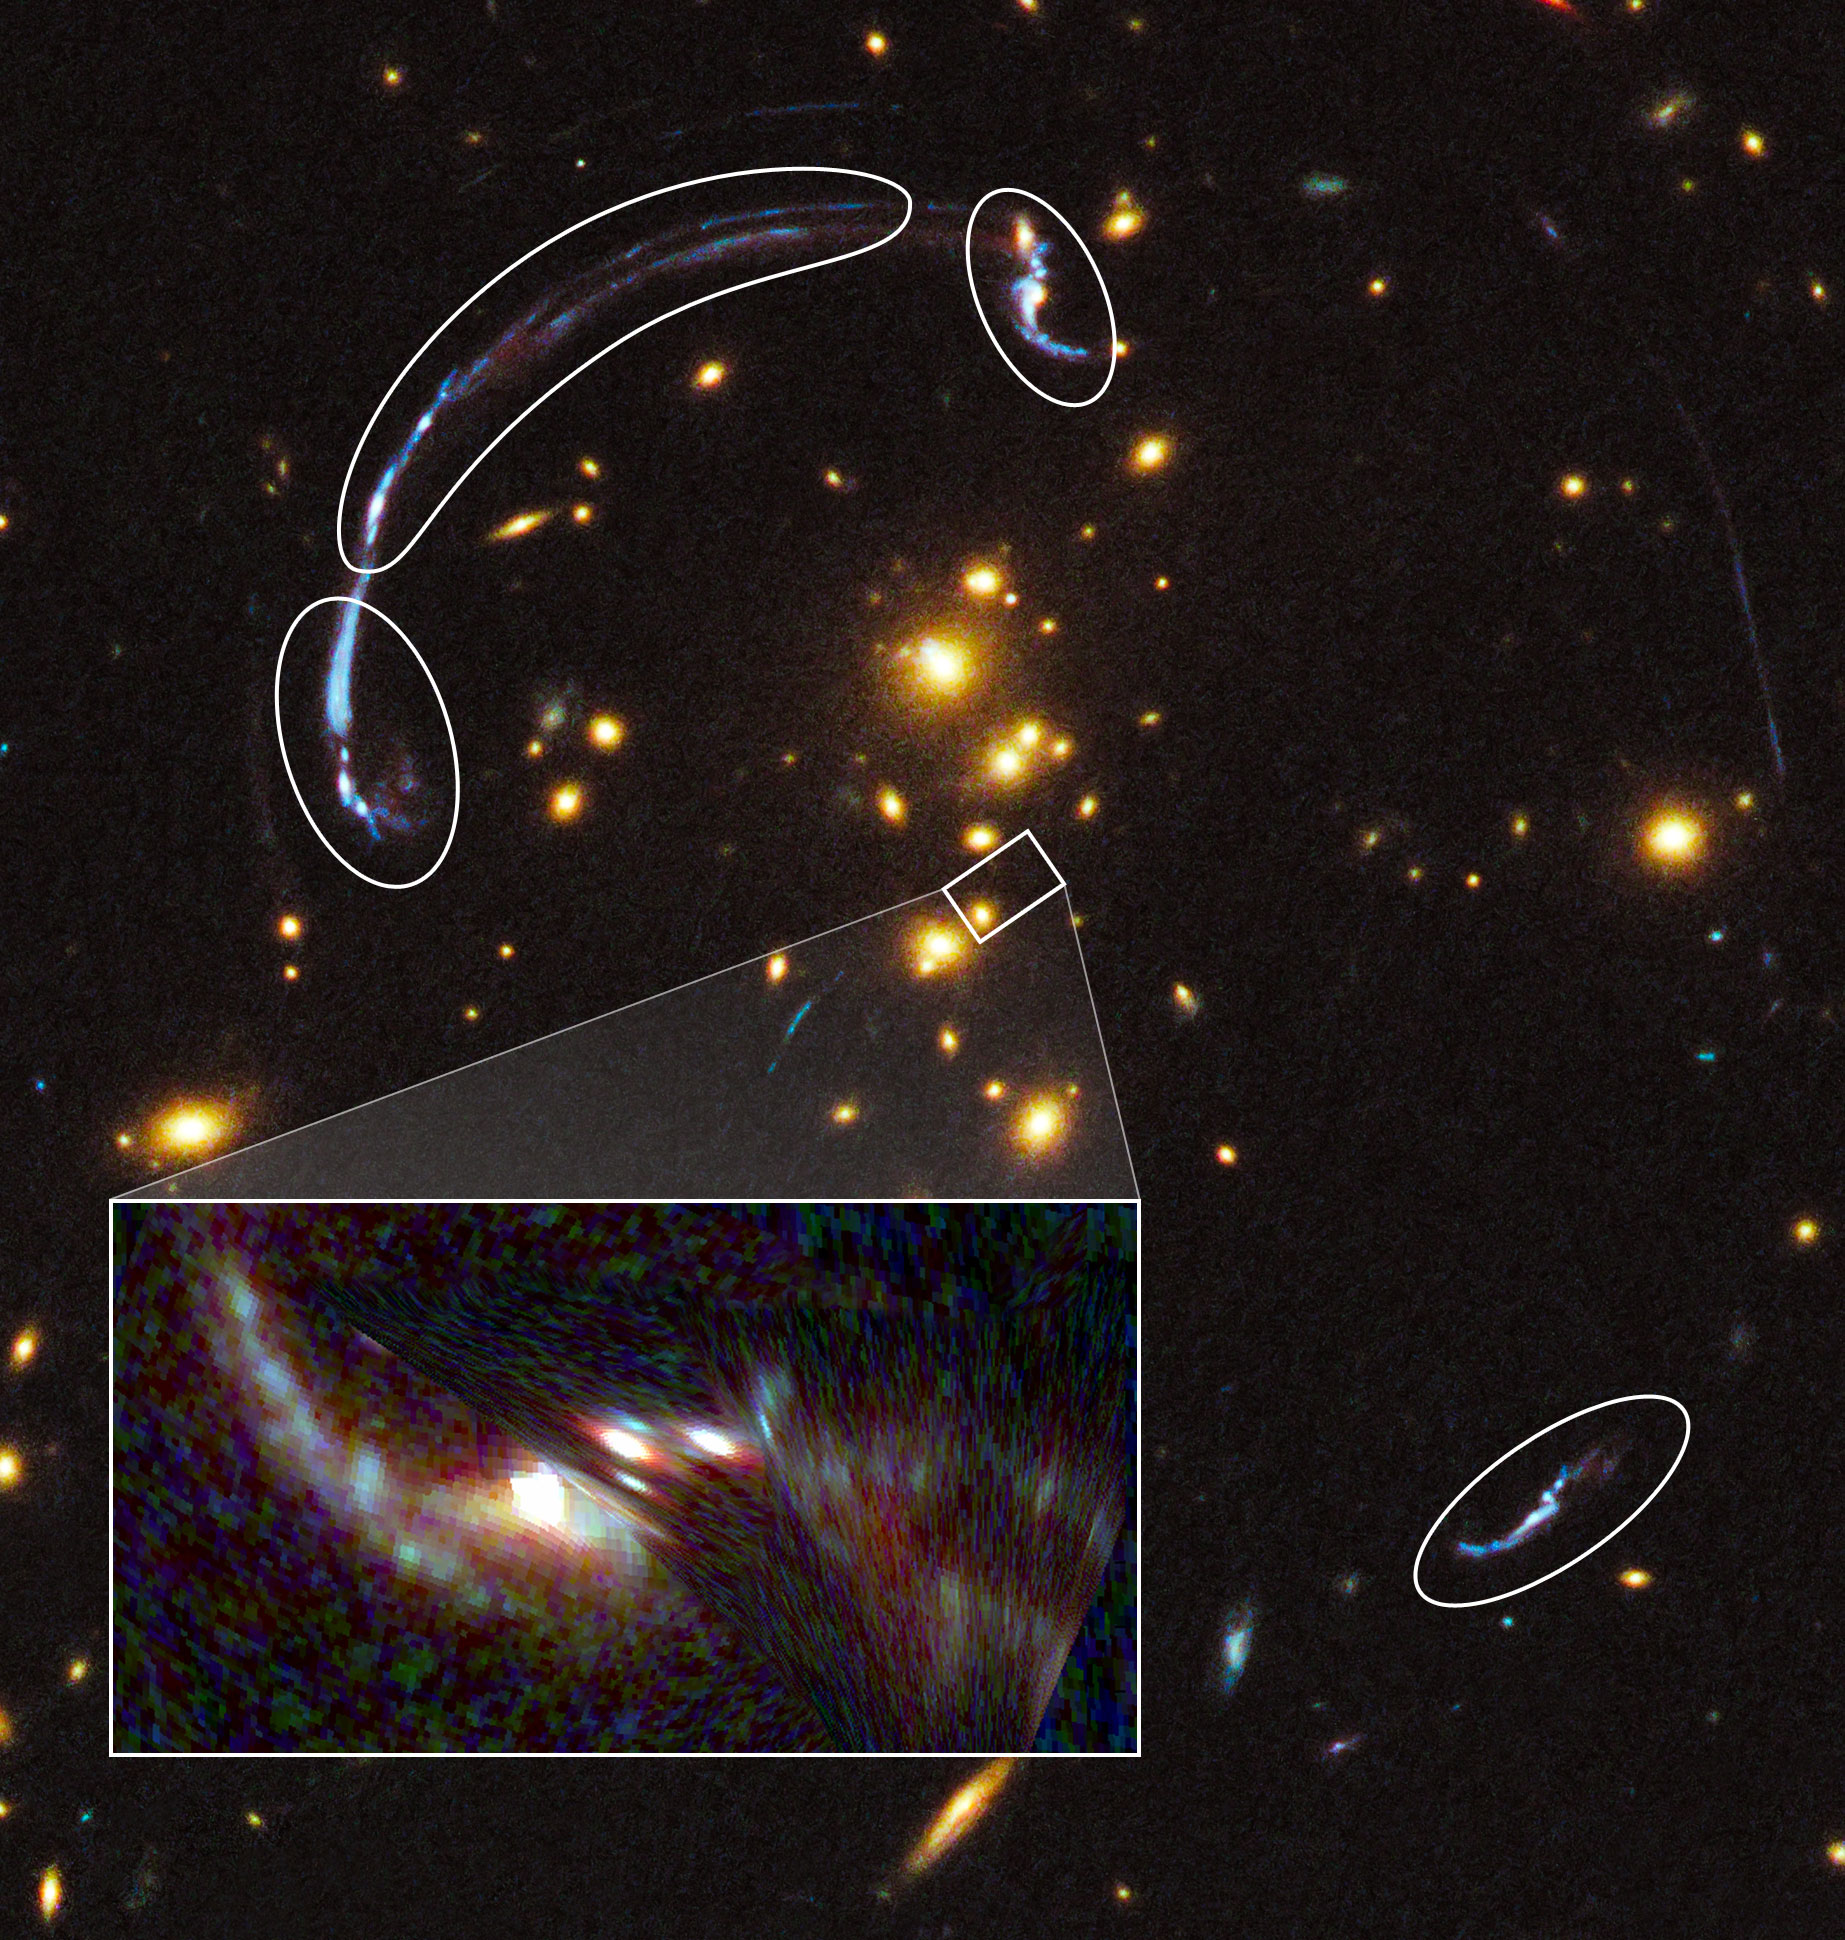

The core of RCS2 032727-132623 and reconstruction of RCSGA 032727-132609

This graphic shows a reconstruction (at lower left) of the brightest galaxy whose image has been distorted by the gravity of a distant galaxy cluster. The small rectangle in the center shows the location of the background galaxy on the sky if the intervening galaxy cluster were not there. The rounded outlines show distinct, distorted images of the background galaxy resulting from lensing by the mass in the cluster. The image at lower left is a reconstruction of what the lensed galaxy would look like in the absence of the cluster, based on a model of the cluster's mass distribution derived from studying the distorted galaxy images.

Credit: NASA, ESA, J. Rigby (NASA Goddard Space Flight Center), K. Sharon (Kavli Institute for Cosmological Physics, University of Chicago), and M. Gladders and E. Wuyts (University of Chicago)